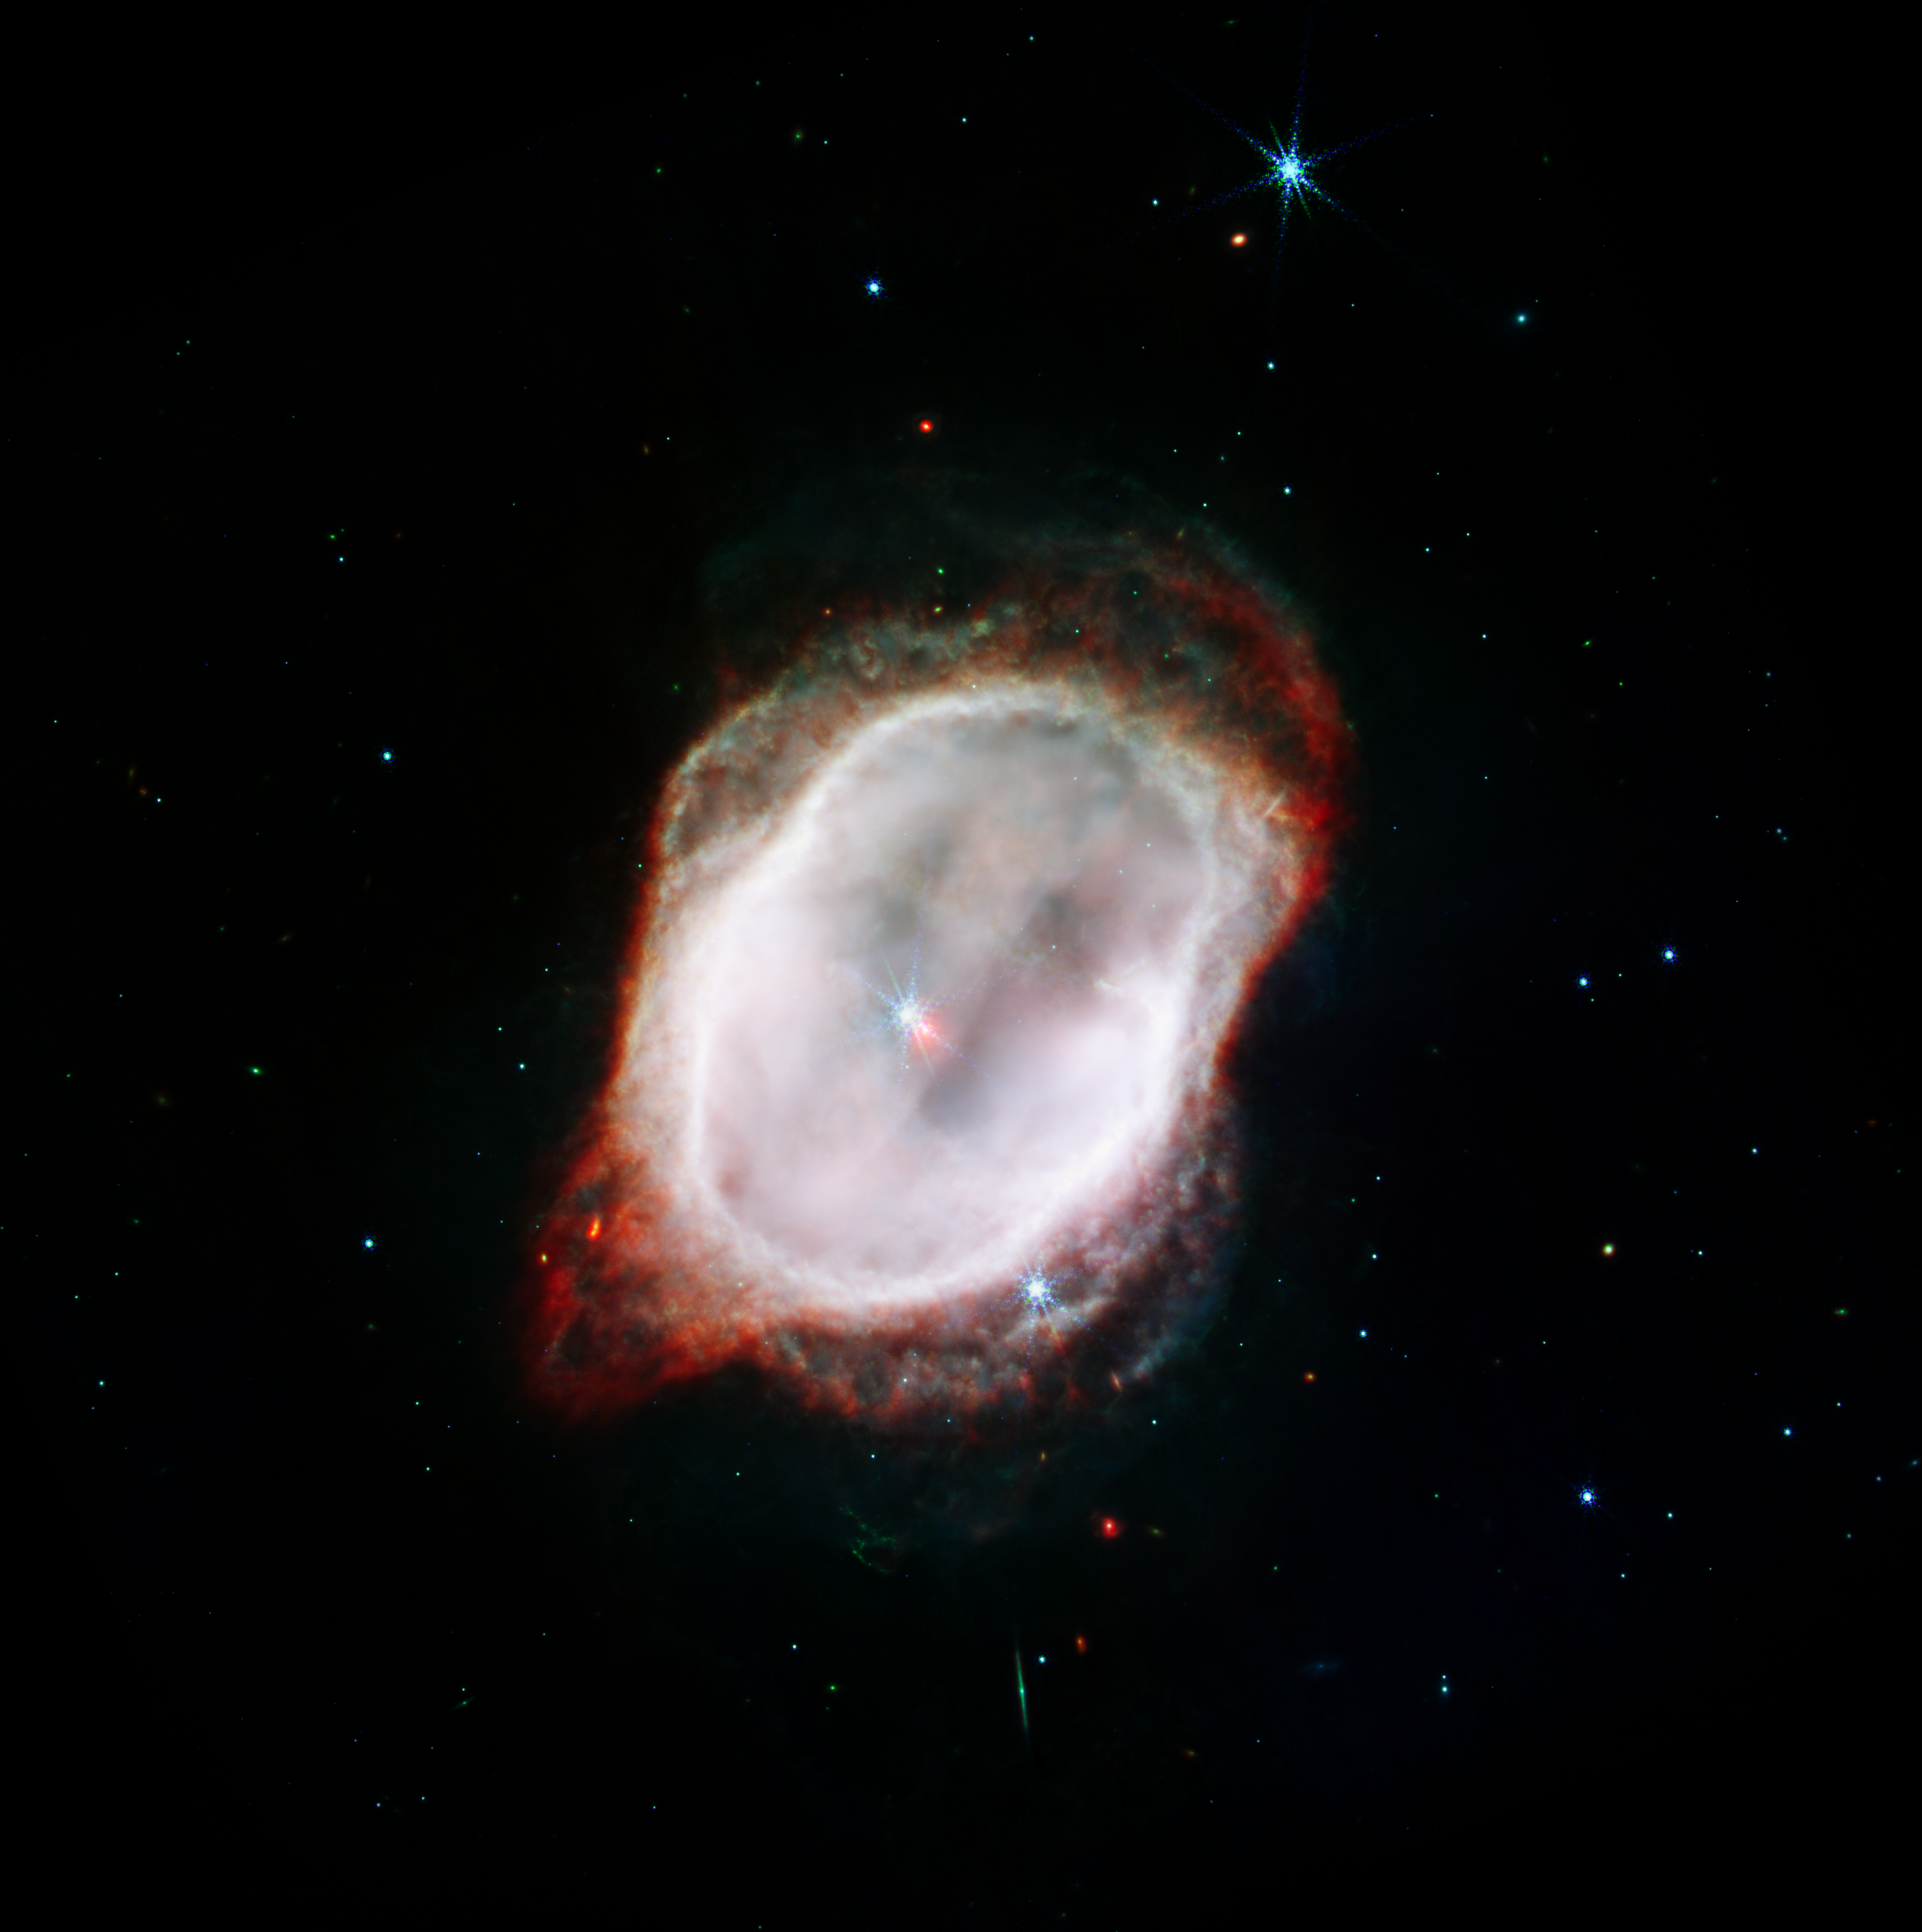

Southern Ring Nebula’s Gas (NIRCam and MIRI Composite Compass Image)

This is an image of the Southern Ring Nebula (NGC 3132), captured by the NASA/ESA/CSA James Webb Space Telescope’s Near-Infrared Camera (NIRCam) and Mid-Infrared Instrument (MIRI). The image combines near- and mid-infrared light from three filters.

Webb’s image highlights the very hot gas that surrounds the central stars. This hot gas is banded by a sharp ring of cooler gas.
By accounting for the temperatures and gas contents in both areas, inside and outside the band, and by combining Webb’s data with precise measurements from other observatories, scientists were able to create far more accurate models to demonstrate when gas was ejected by the central star (which appears red in this image).

Credit: NASA, ESA, CSA, STScI, O. De Marco (Macquarie University), J. DePasquale (STScI)